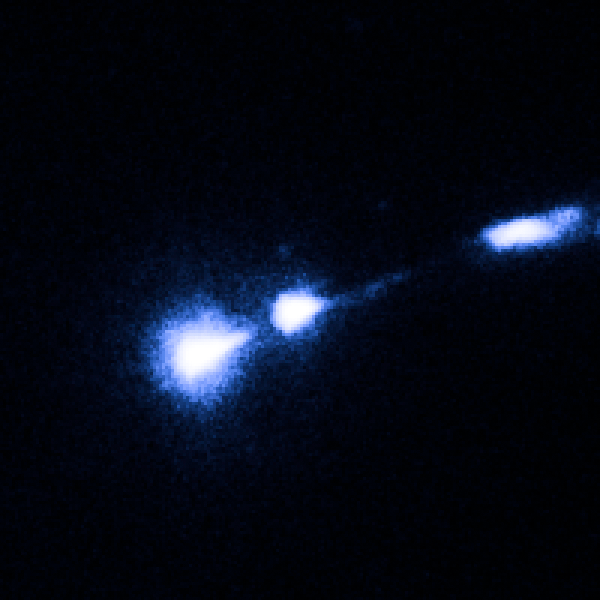

M87 nucleus and bright knot

Image taken on 17 July 2002.

Credit: NASA, ESA and J. Madrid (McMaster University, Canada)